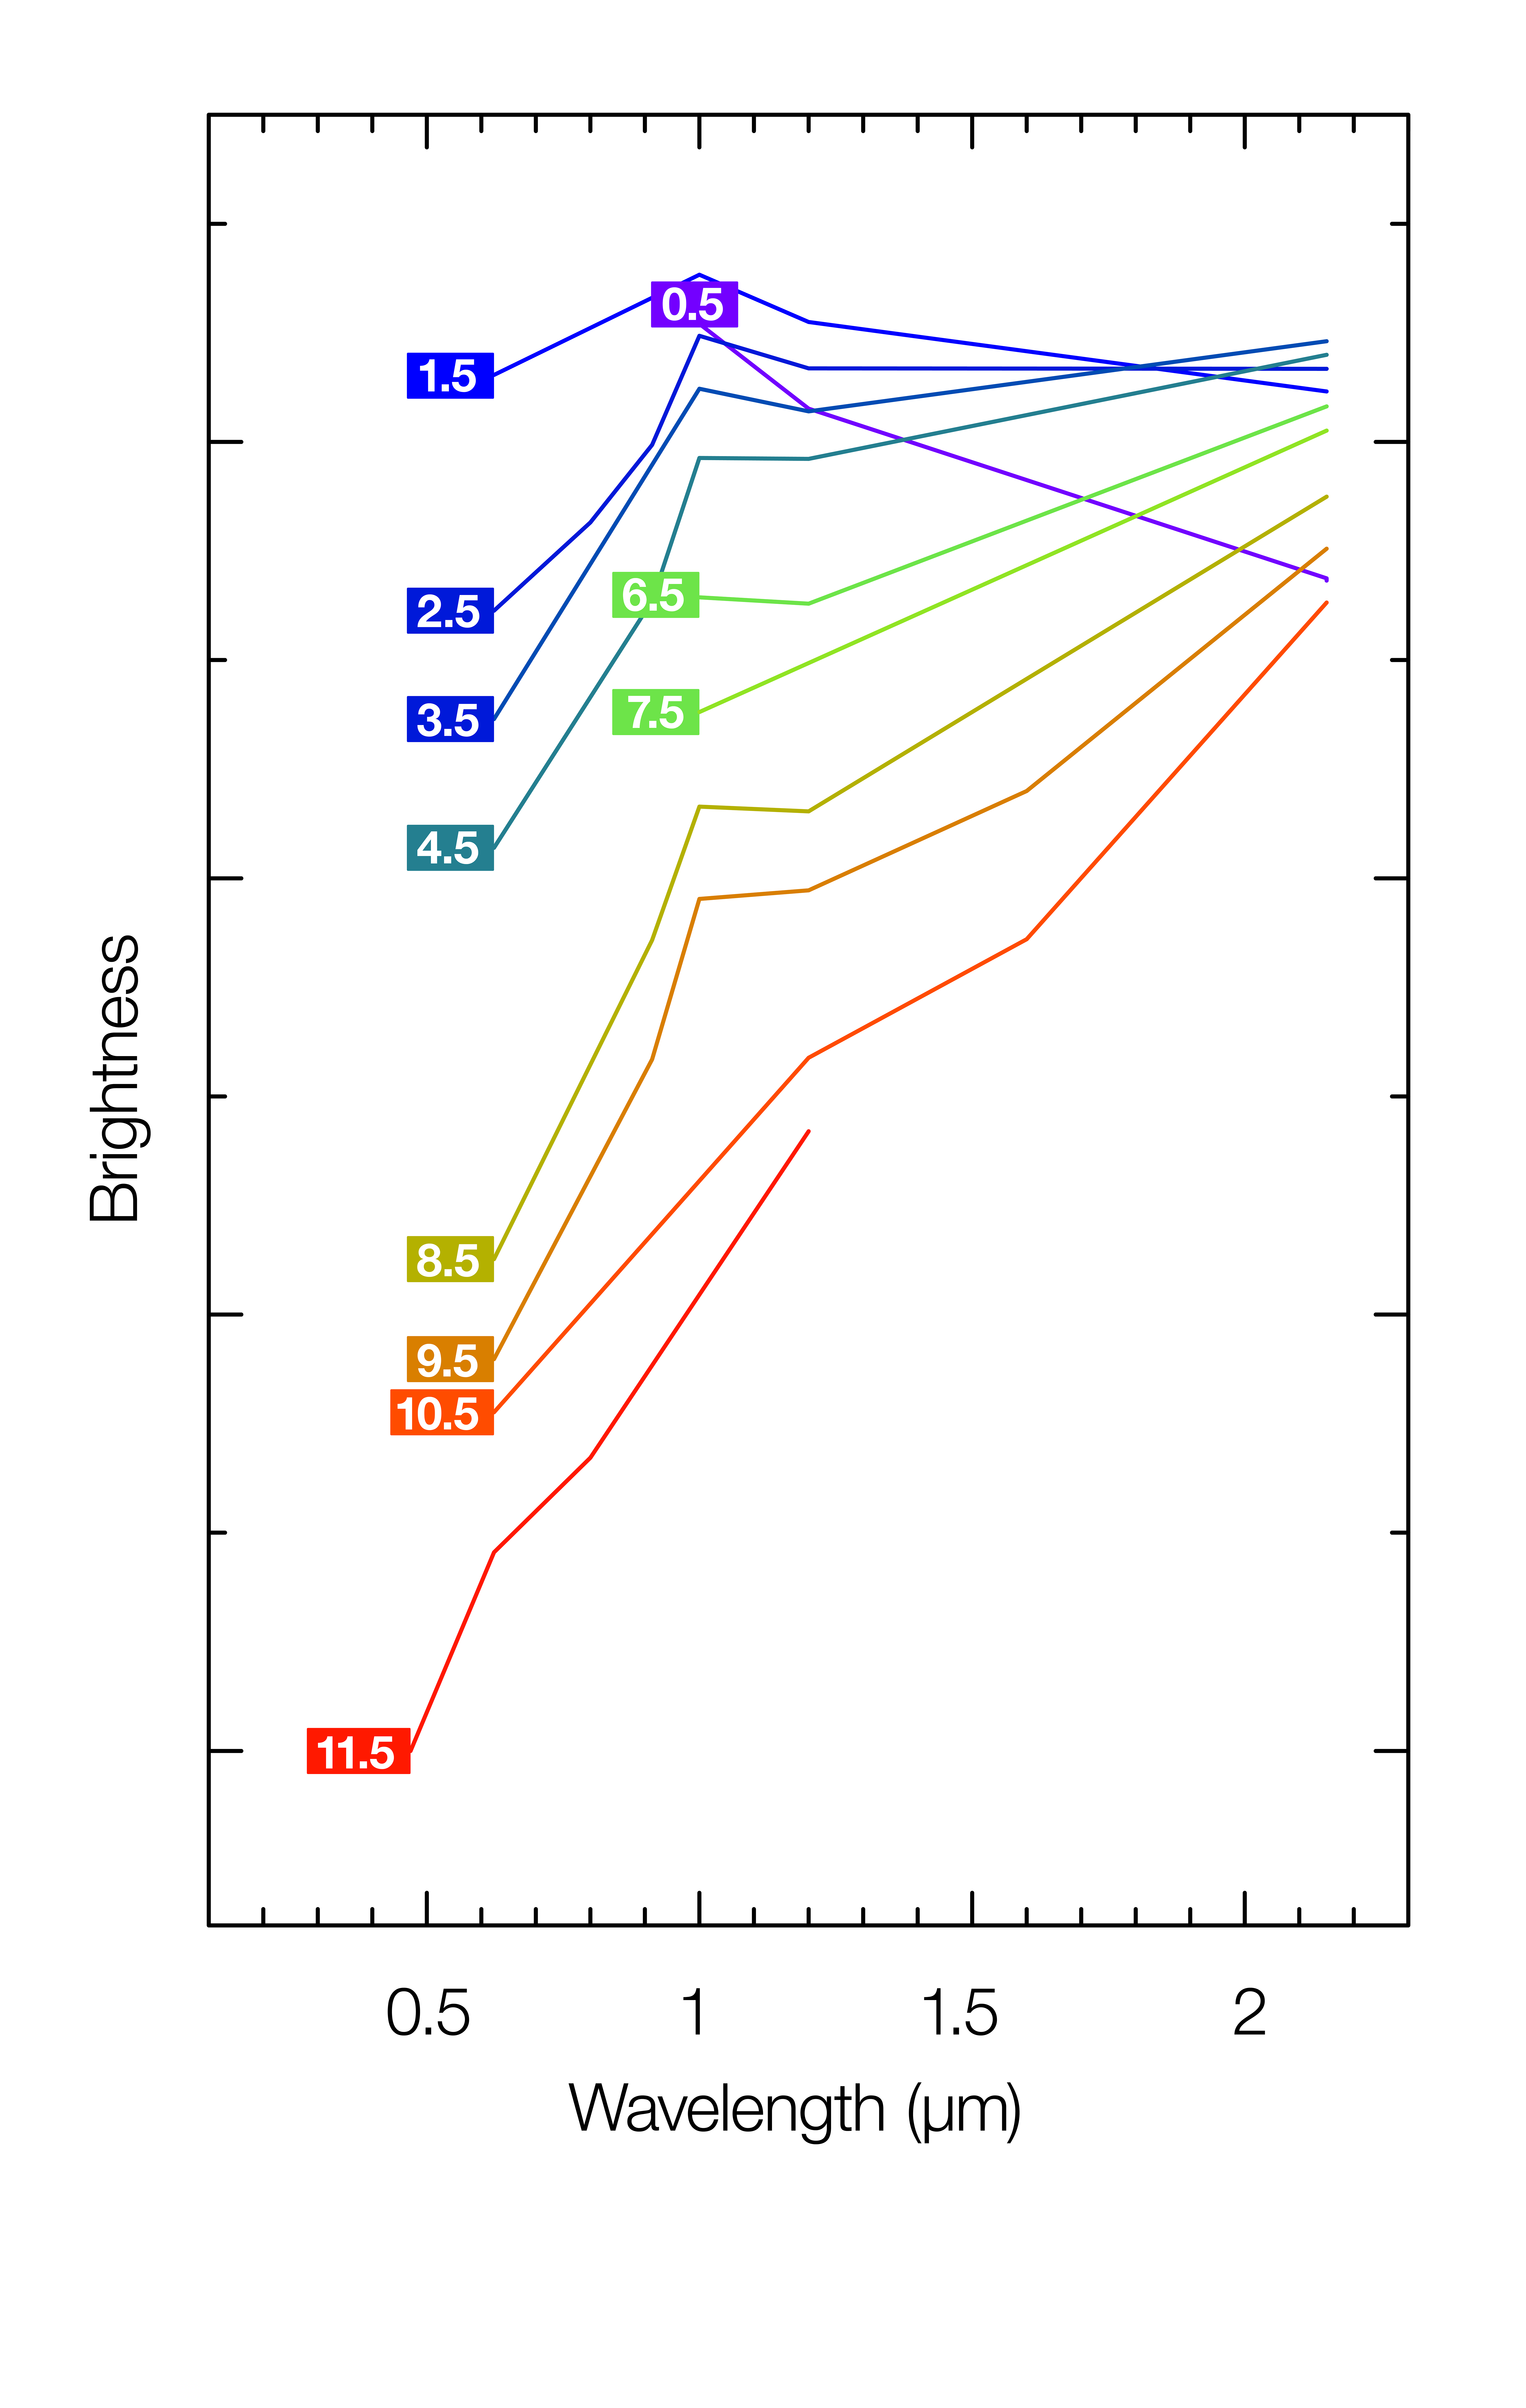

The changing brightness and colour of the kilonova seen in NGC 4993

This plot shows how the spectrum and brightness of the kilonova seen in the galaxy NGC 4993 changed over 12 days following the detection of gravitational waves on 17 August 2017. In blue light the object faded rapidly, but at longer wavelengths, in the near infrared part of the spectrum, it brightened a little and then faded much more slowly. As a result this object changed colour from very blue to very red during this period. Each line is labeled with the number of days since the explosion and the horizontal axis is the colour of the light, from ultraviolet to near-infrared. The colours of the lines indicate the overall colour of the object at the different times.

Credit: N. Tanvir et al.